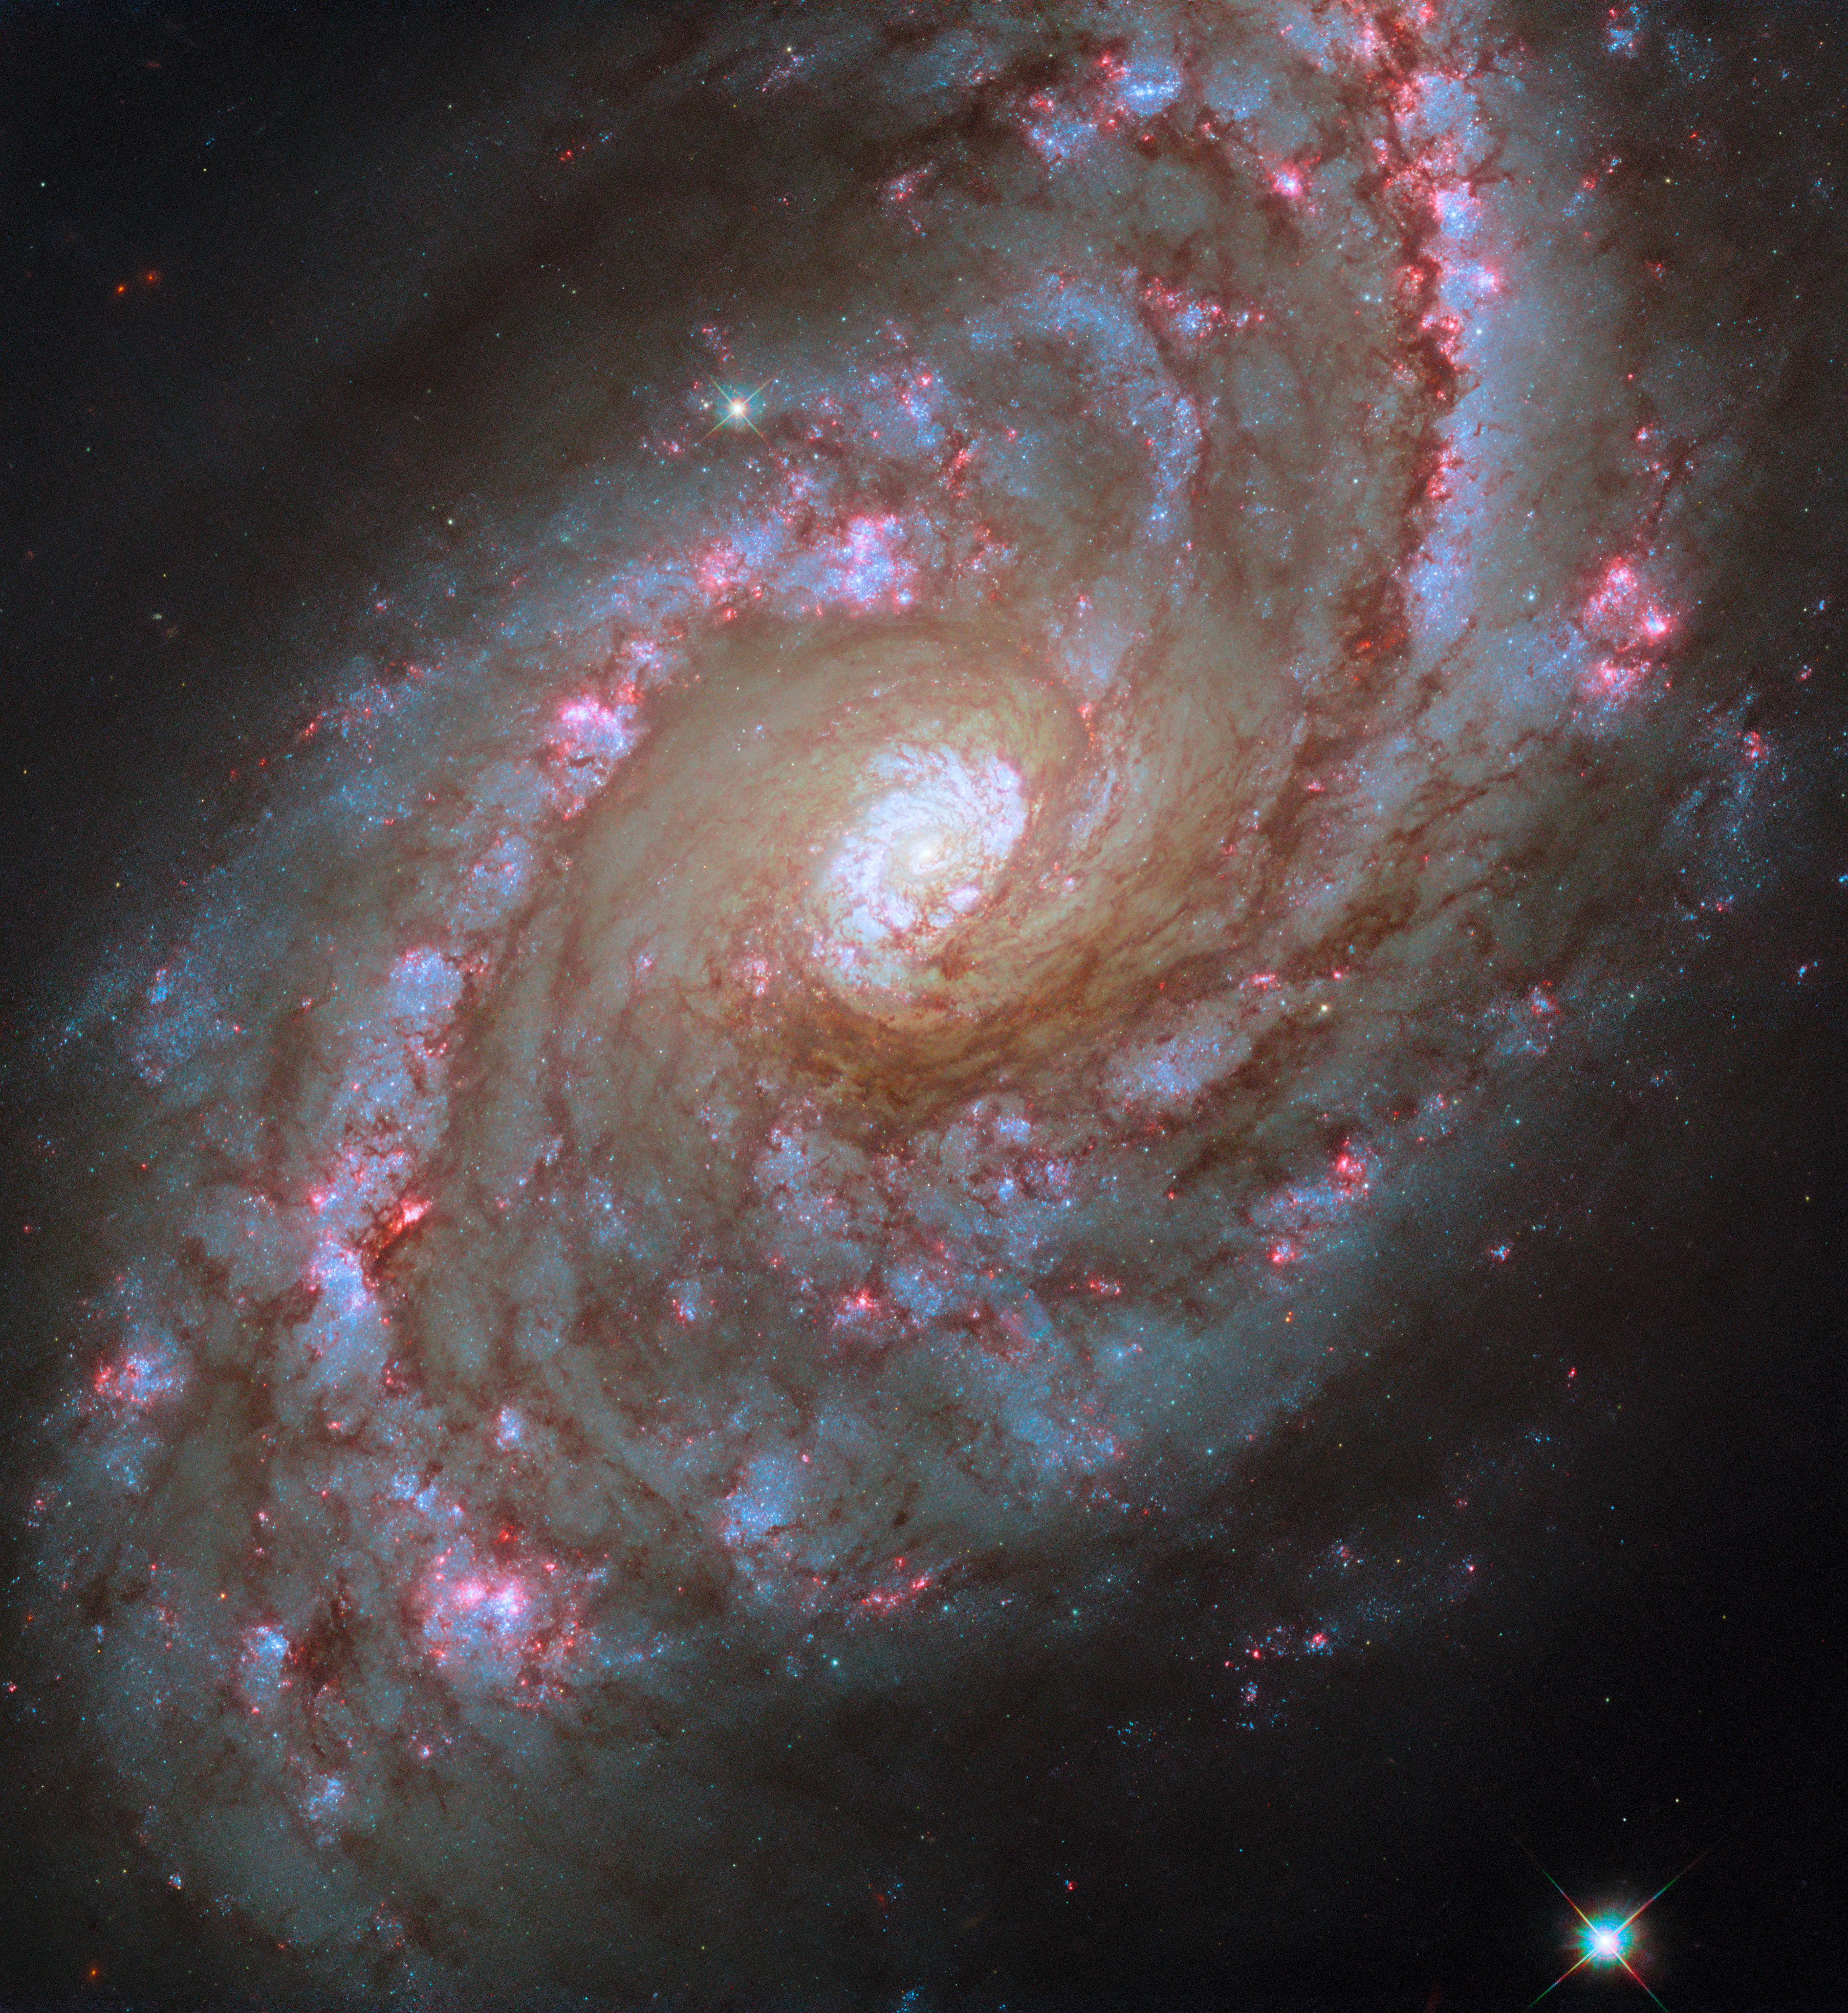

Starbursts on grand scale

The sparkling scene depicted in this week’s Hubble Picture of the Week is of the spiral galaxy NGC 5248, located 42 million light-years from Earth in the constellation Boötes. It is also known as Caldwell 45, having been included in a catalogue of visually interesting celestial objects that were known, but weren’t as commonly observed by amateur astronomers as the more famous Messier objects.

NGC 5248 is one of the so-called ‘grand design’ spirals, with prominent spiral arms that reach from near the core out through the disc. It also has a faint bar structure in the centre, between the inner ends of the spiral arms, which is not quite so obvious in this visible-light portrait from Hubble. Features like these which break the rotational symmetry of a galaxy have a huge influence on how matter moves through it, and eventually its evolution through time. They feed gas from a galaxy’s outer reaches to inner star-forming regions, and even to a galaxy’s central black hole where it can kick-start an active galactic nucleus.

These flows of gas have shaped NGC 5248 in a big way; it has many bright ‘starburst regions’ of intense star formation spread across its disc, and it is dominated by a population of young stars. The galaxy even has two very active, ring-shaped starburst regions around its nucleus, filled with young clusters of stars. These ‘nuclear rings’ are remarkable enough, but normally a nuclear ring tends to block gas from getting further into the core of a galaxy. NGC 5248 having a second ring inside the first is a marker of just how forceful its flows of matter and energy are! Its relatively nearby, highly visible starburst regions make the galaxy a target for professional and amateur astronomers alike.

Credit: ESA/Hubble & NASA, F. Belfiore, J. Lee and the PHANGS-HST Team